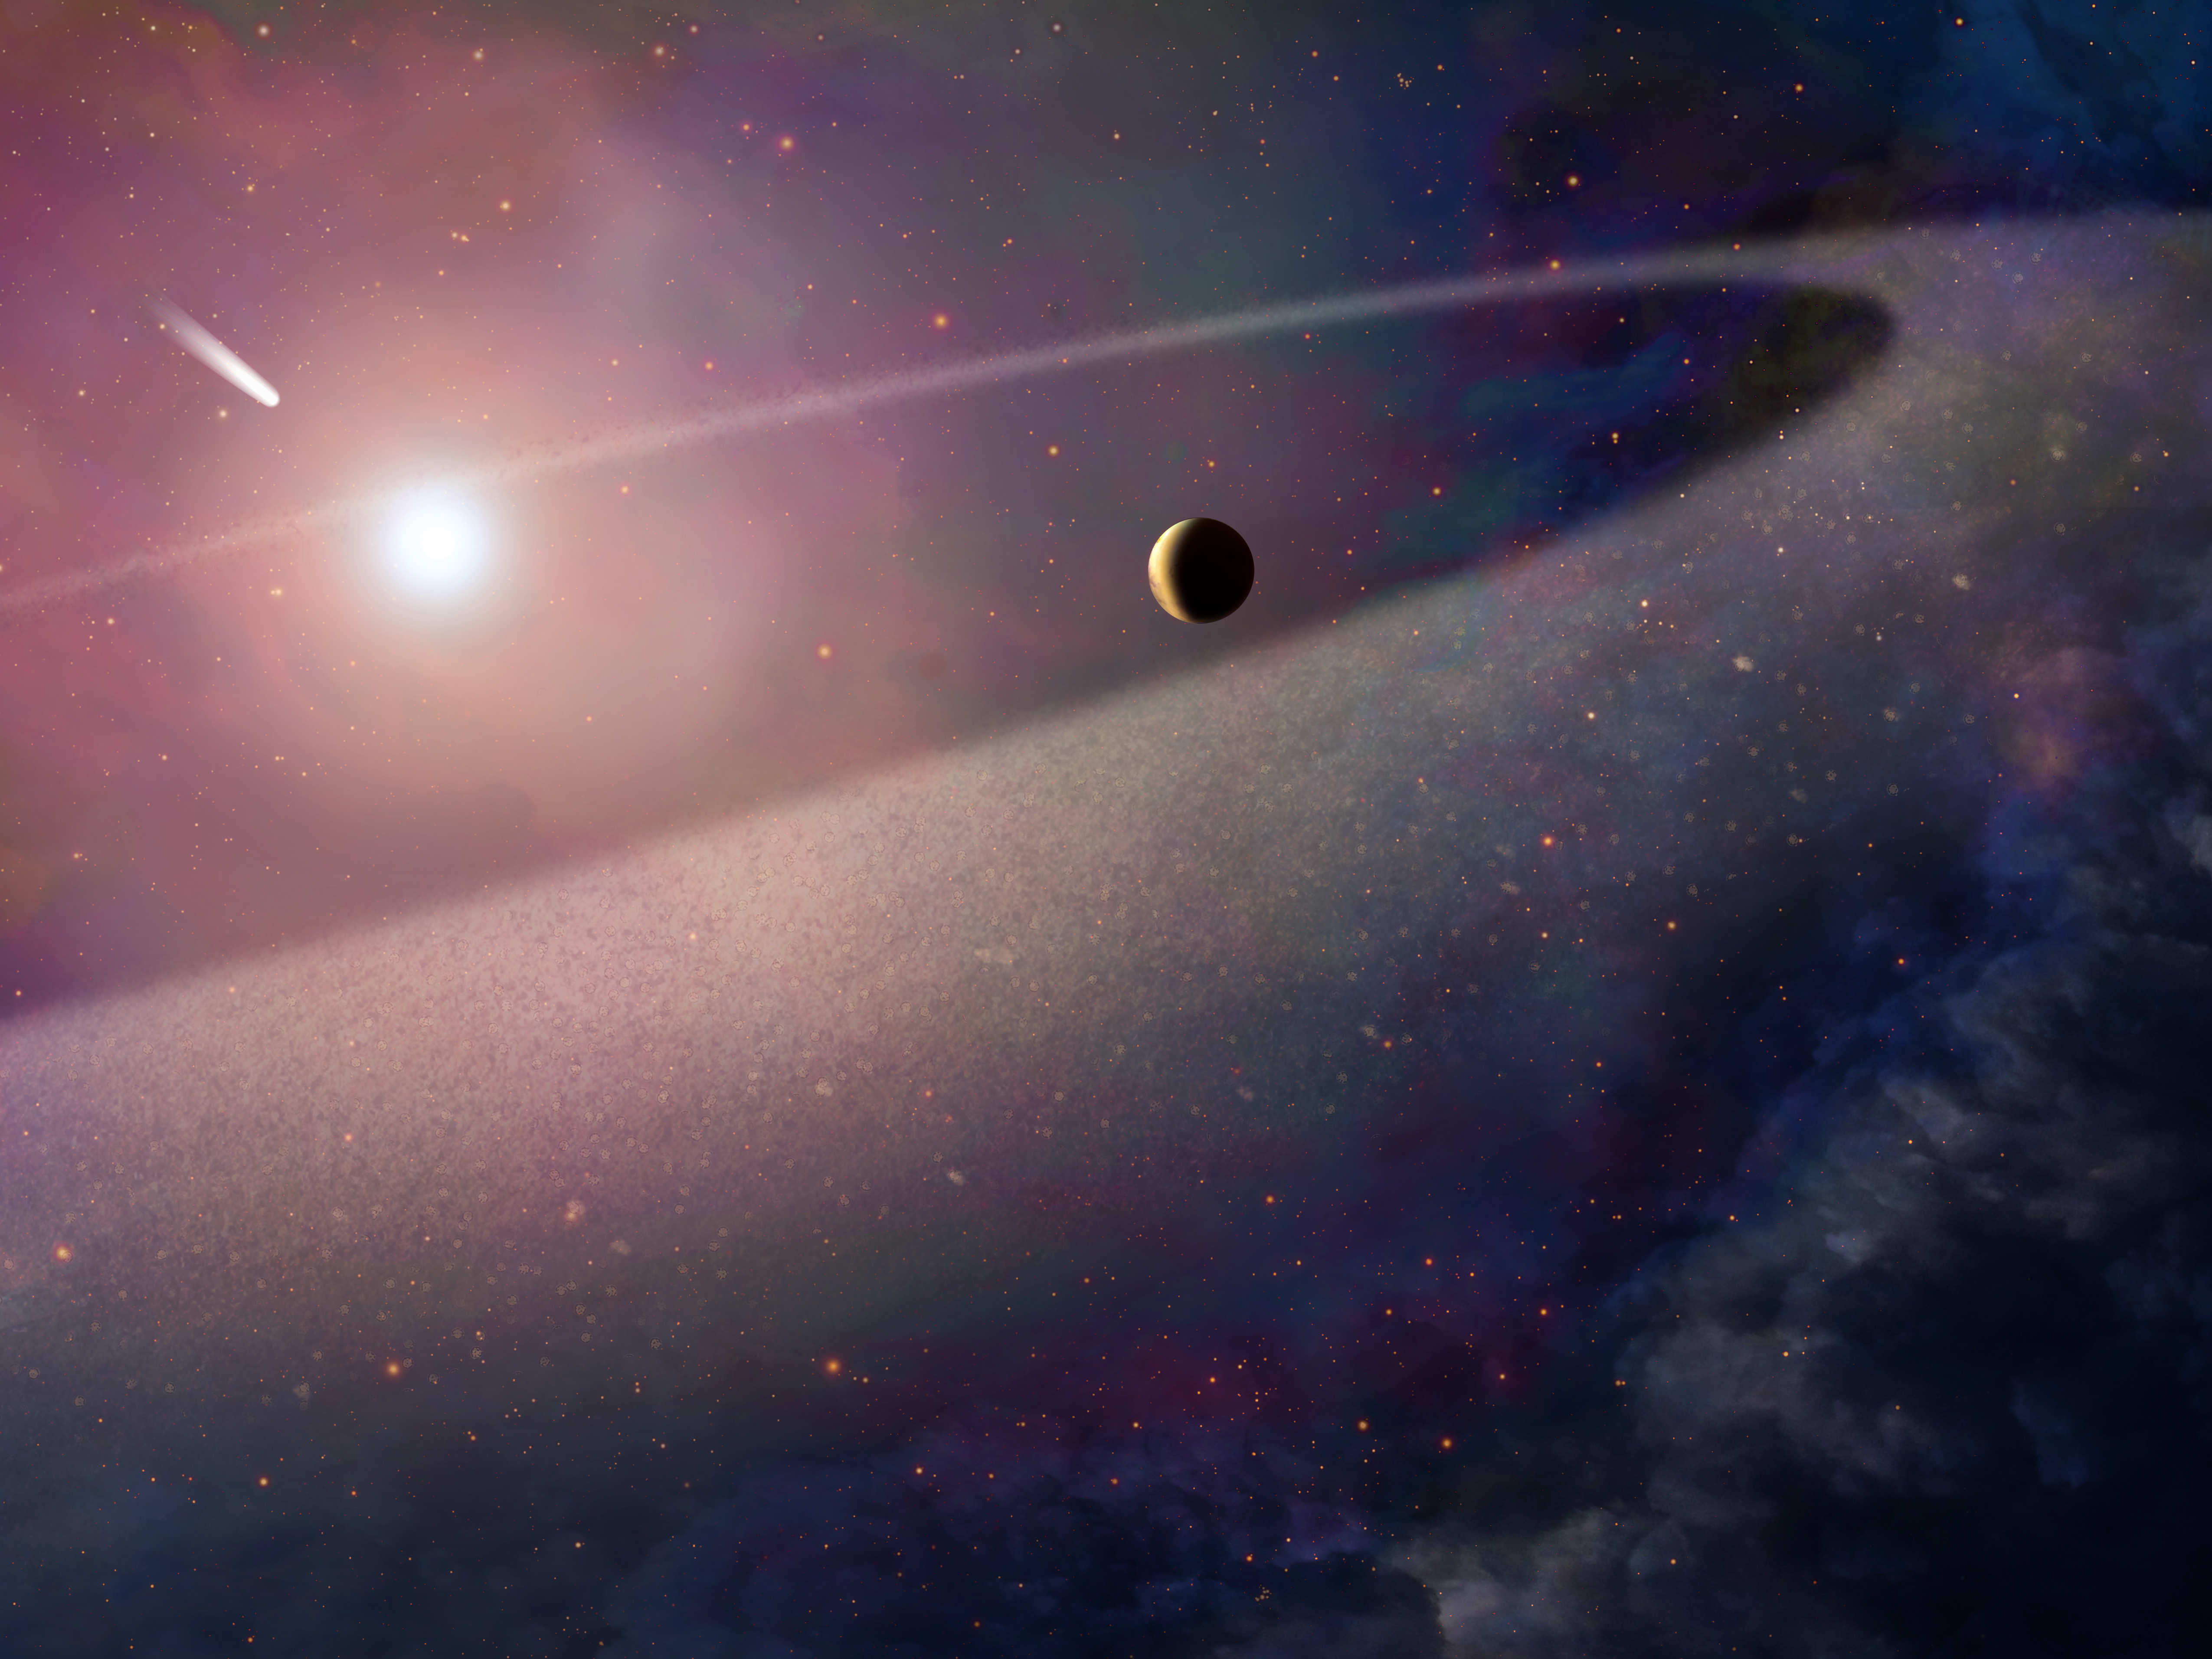

Comet falling into white dwarf (artist's impression)

This artist’s impression shows a massive, comet-like object falling towards a white dwarf. New observations with the NASA/ESA Hubble Space Telescope show evidence for a belt of comet-like bodies orbiting the white dwarf, similar to the Kuiper Belt in our own Solar System. The findings also suggest the presence of one or more unseen surviving planets around the white dwarf which may have perturbed the belt sufficiently to hurl icy objects into the burned-out star.

Credit: NASA, ESA, and Z. Levy (STScI)